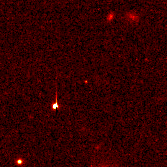

Hubble pinpoints distant supernovae

These Hubble Space Telescope images pinpoint three distant supernovae, which exploded and died billions of years ago. Scientists are using these faraway light sources to estimate if the universe was expanding at a faster rate long ago and is now slowing down.

Credit: Peter Garnavich, Harvard-Smithsonian Center for Astrophysics, the High-z Supernova Search Team, and NASA/ESA